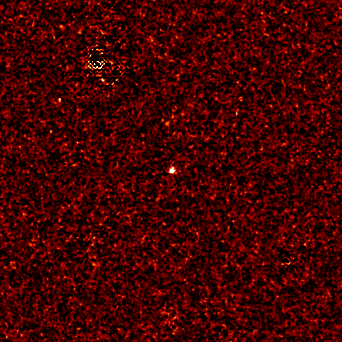

Farthest Supernova ever - SN 1997ff

This image shows the supernova itself, distinguished by the white dot in the center. Although this stellar explosion is among the brightest beacons in the universe, it could not be seen directly in the Hubble images. The stellar blast is so distant from Earth that its light is buried in the glow of its host galaxy.

Credit: NASA/ESA, Adam Riess ( Space Telescope Science Institute, Baltimore, MD)